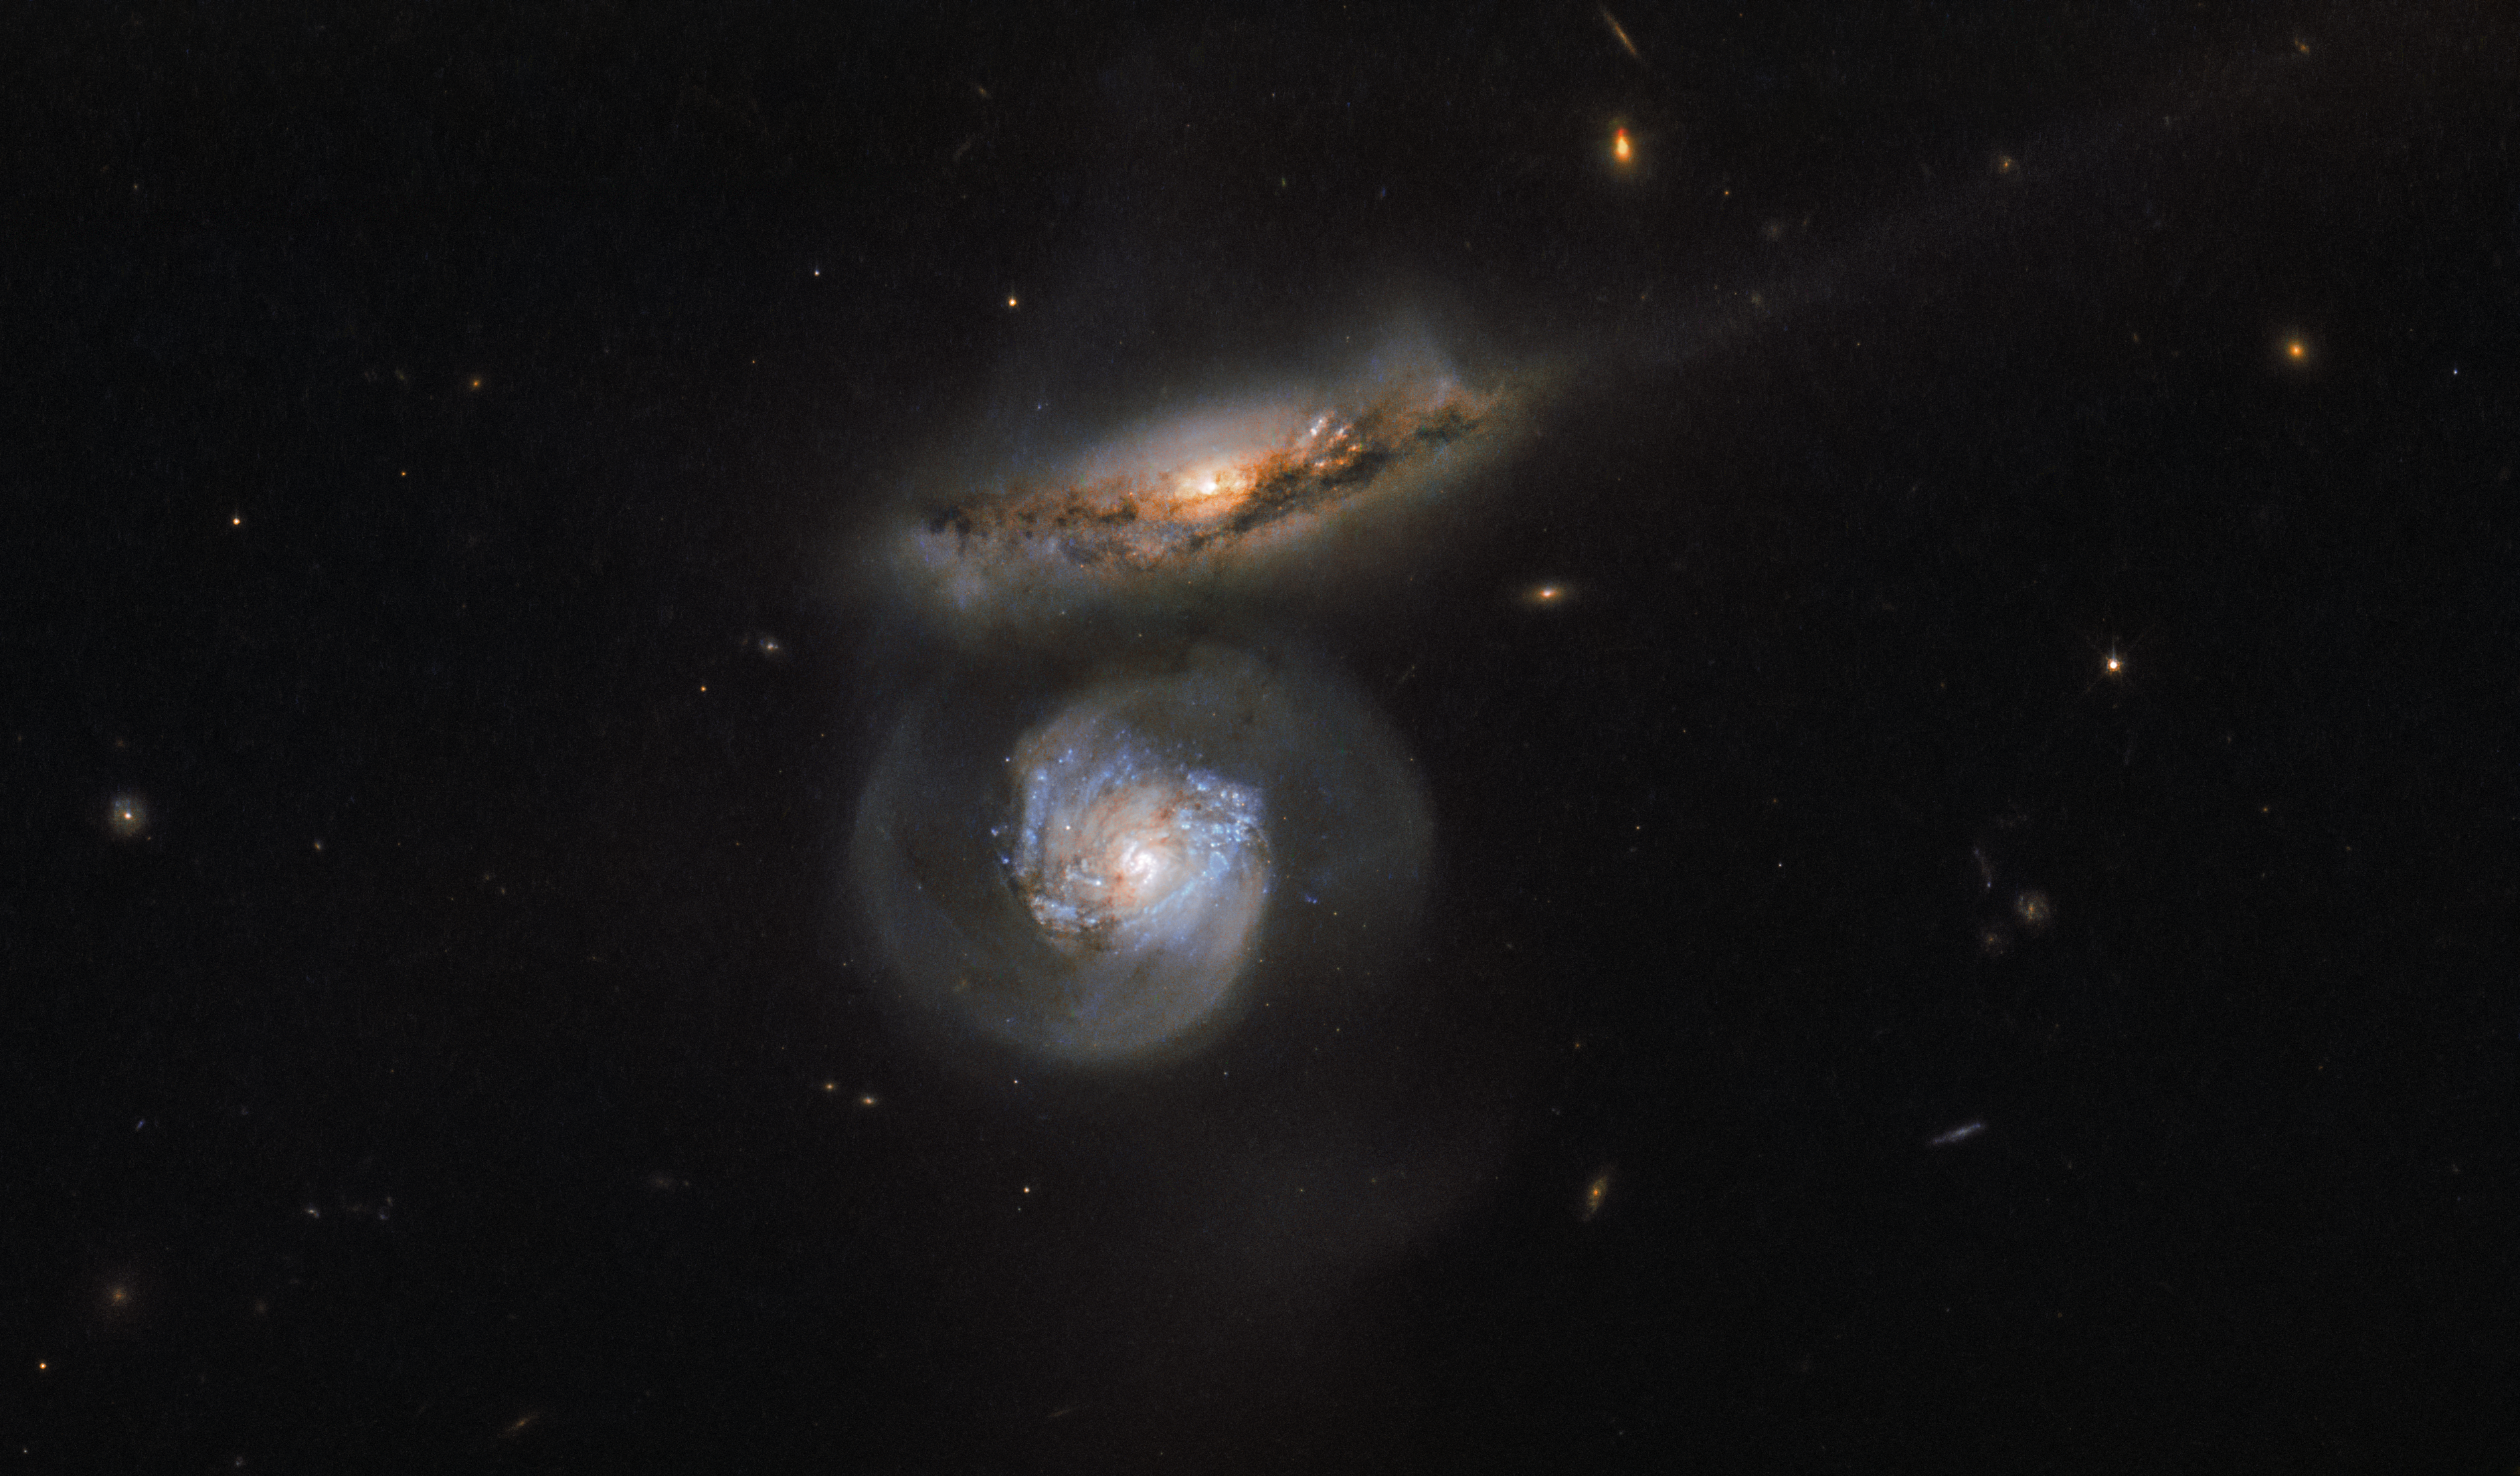

From microwaves to megamasers

Phenomena across the Universe emit radiation spanning the entire electromagnetic spectrum — from high-energy gamma rays, which stream out from the most energetic events in the cosmos, to lower-energy microwaves and radio waves.

Microwaves, the very same radiation that can heat up your dinner, are produced by a multitude of astrophysical sources, including strong emitters known as masers (microwave lasers), even stronger emitters with the somewhat villainous name of megamasers, and the centres of some galaxies. Especially intense and luminous galactic centres are known as active galactic nuclei. They are in turn thought to be driven by the presence of supermassive black holes, which drag surrounding material inwards and spit out bright jets and radiation as they do so.

The two galaxies shown here, imaged by the NASA/ESA Hubble Space Telescope, are named MCG+01-38-004 (the upper, red-tinted one) and MCG+01-38-005 (the lower, blue-tinted one). MCG+01-38-005 is a special kind of megamaser; the galaxy’s active galactic nucleus pumps out huge amounts of energy, which stimulates clouds of surrounding water. Water’s constituent atoms of hydrogen and oxygen are able to absorb some of this energy and re-emit it at specific wavelengths, one of which falls within the microwave regime. MCG+01-38-005 is thus known as a water megamaser!

Astronomers can use such objects to probe the fundamental properties of the Universe. The microwave emissions from MCG+01-38-005 were used to calculate a refined value for the Hubble constant, a measure of how fast the Universe is expanding. This constant is named after the astronomer whose observations were responsible for the discovery of the expanding Universe and after whom the Hubble Space Telescope was named, Edwin Hubble.

Credit: ESA/Hubble & NASA